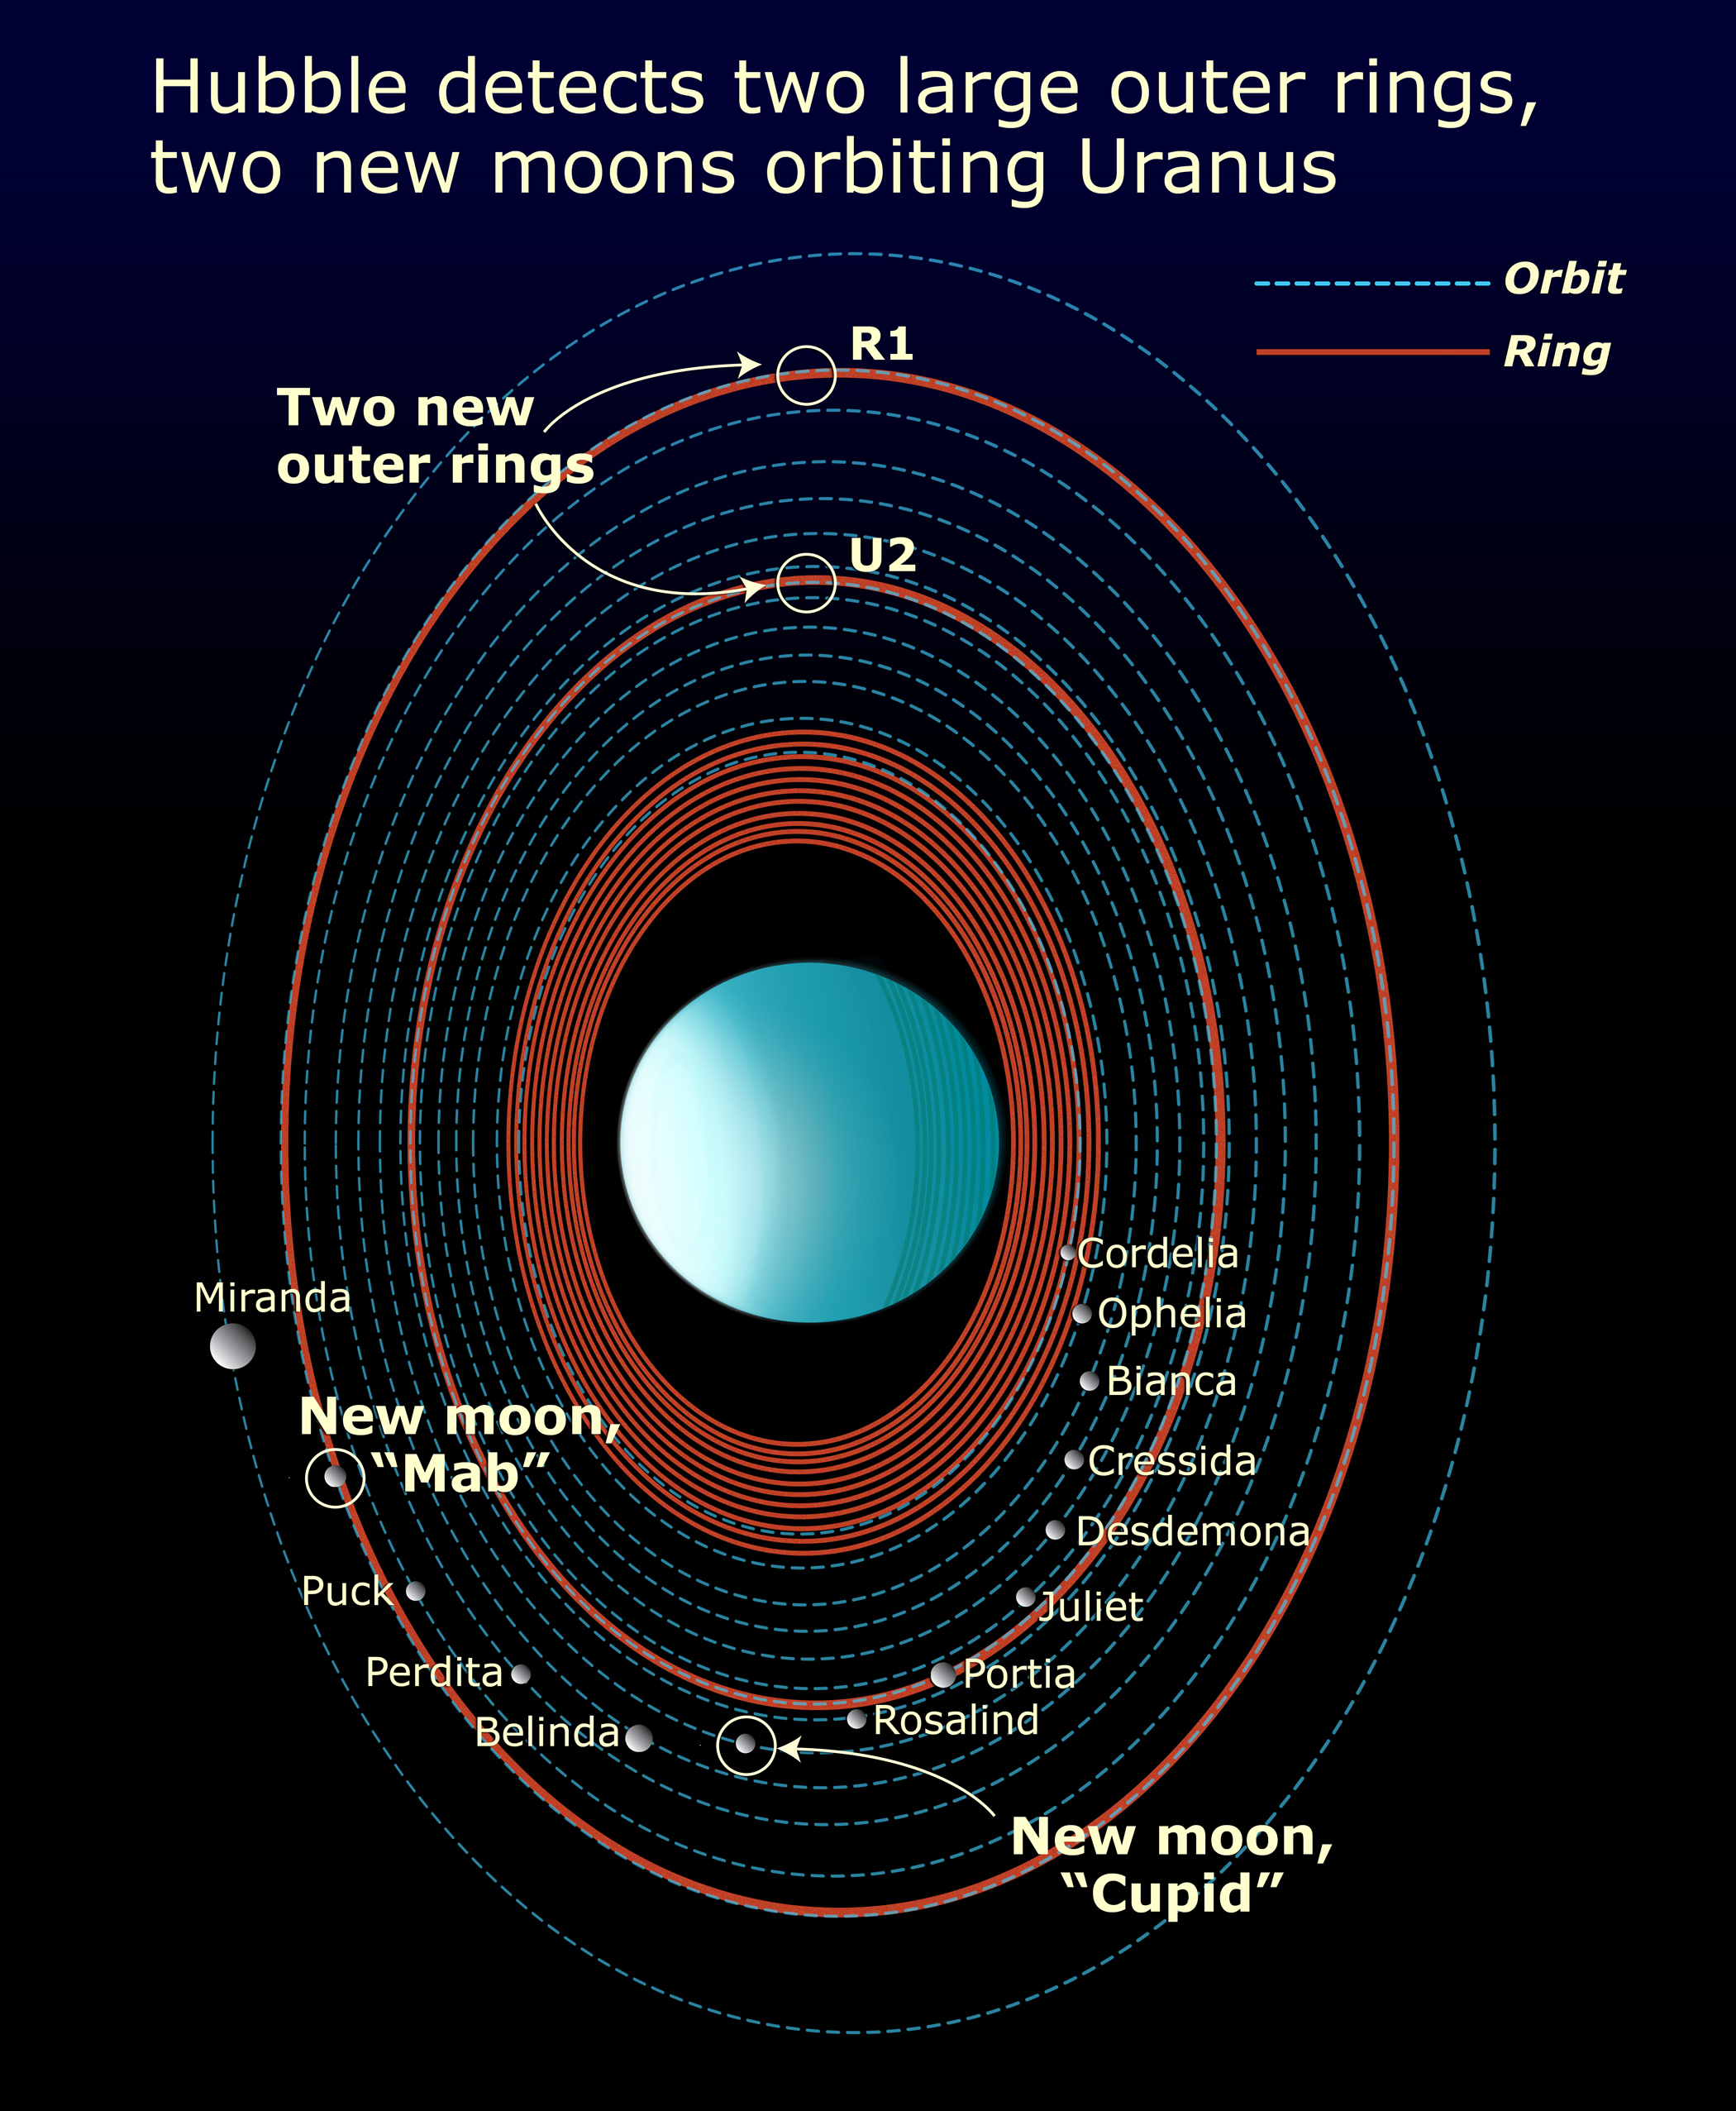

Features in the Uranus system

Diagram of the Uranus system, showing moons and rings.

Credit: NASA, ESA, and A. Feild (STScI)